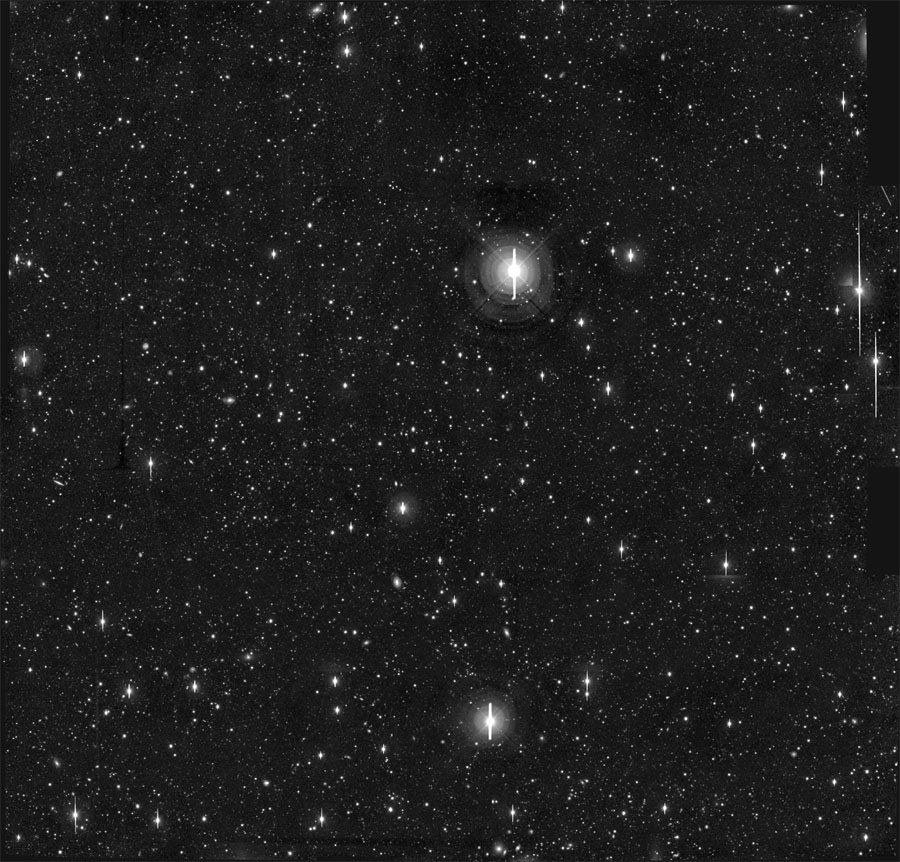

HDF-S area in the sky

After the great success of the origninal Hubble Deep Field, later called Hubble Deep Field North (HDF-N), an identical project for the southern hemisphere, the Hubble Deep Field South (HDF-S), was done over ten days in September 1998. With similar exposure times as in the HDF-N the HDF-S was created of a composite of several hundred individual images taken using the Hubble Space Telescope's Wide Field and Planetary Camera 2.

The goal of this deep sky optical image was the observation of the distant universe and extremly distant galaxies in early stages of their evolution. In addition astronomers could study the cosmological principle states that at the largest scales, the universe is homogeneous and isotropic, meaning that it should look the same in any direction. A similar distribution and amount of different kinds of objects was indeed found in the HDF-S as in the HDF-N.

The image presented here shows not only the area of the HDF-S but also its surrounding.

Credit: J. Gardner (NOAO/GSFC), Cerro Tololo Inter- American Observatory.